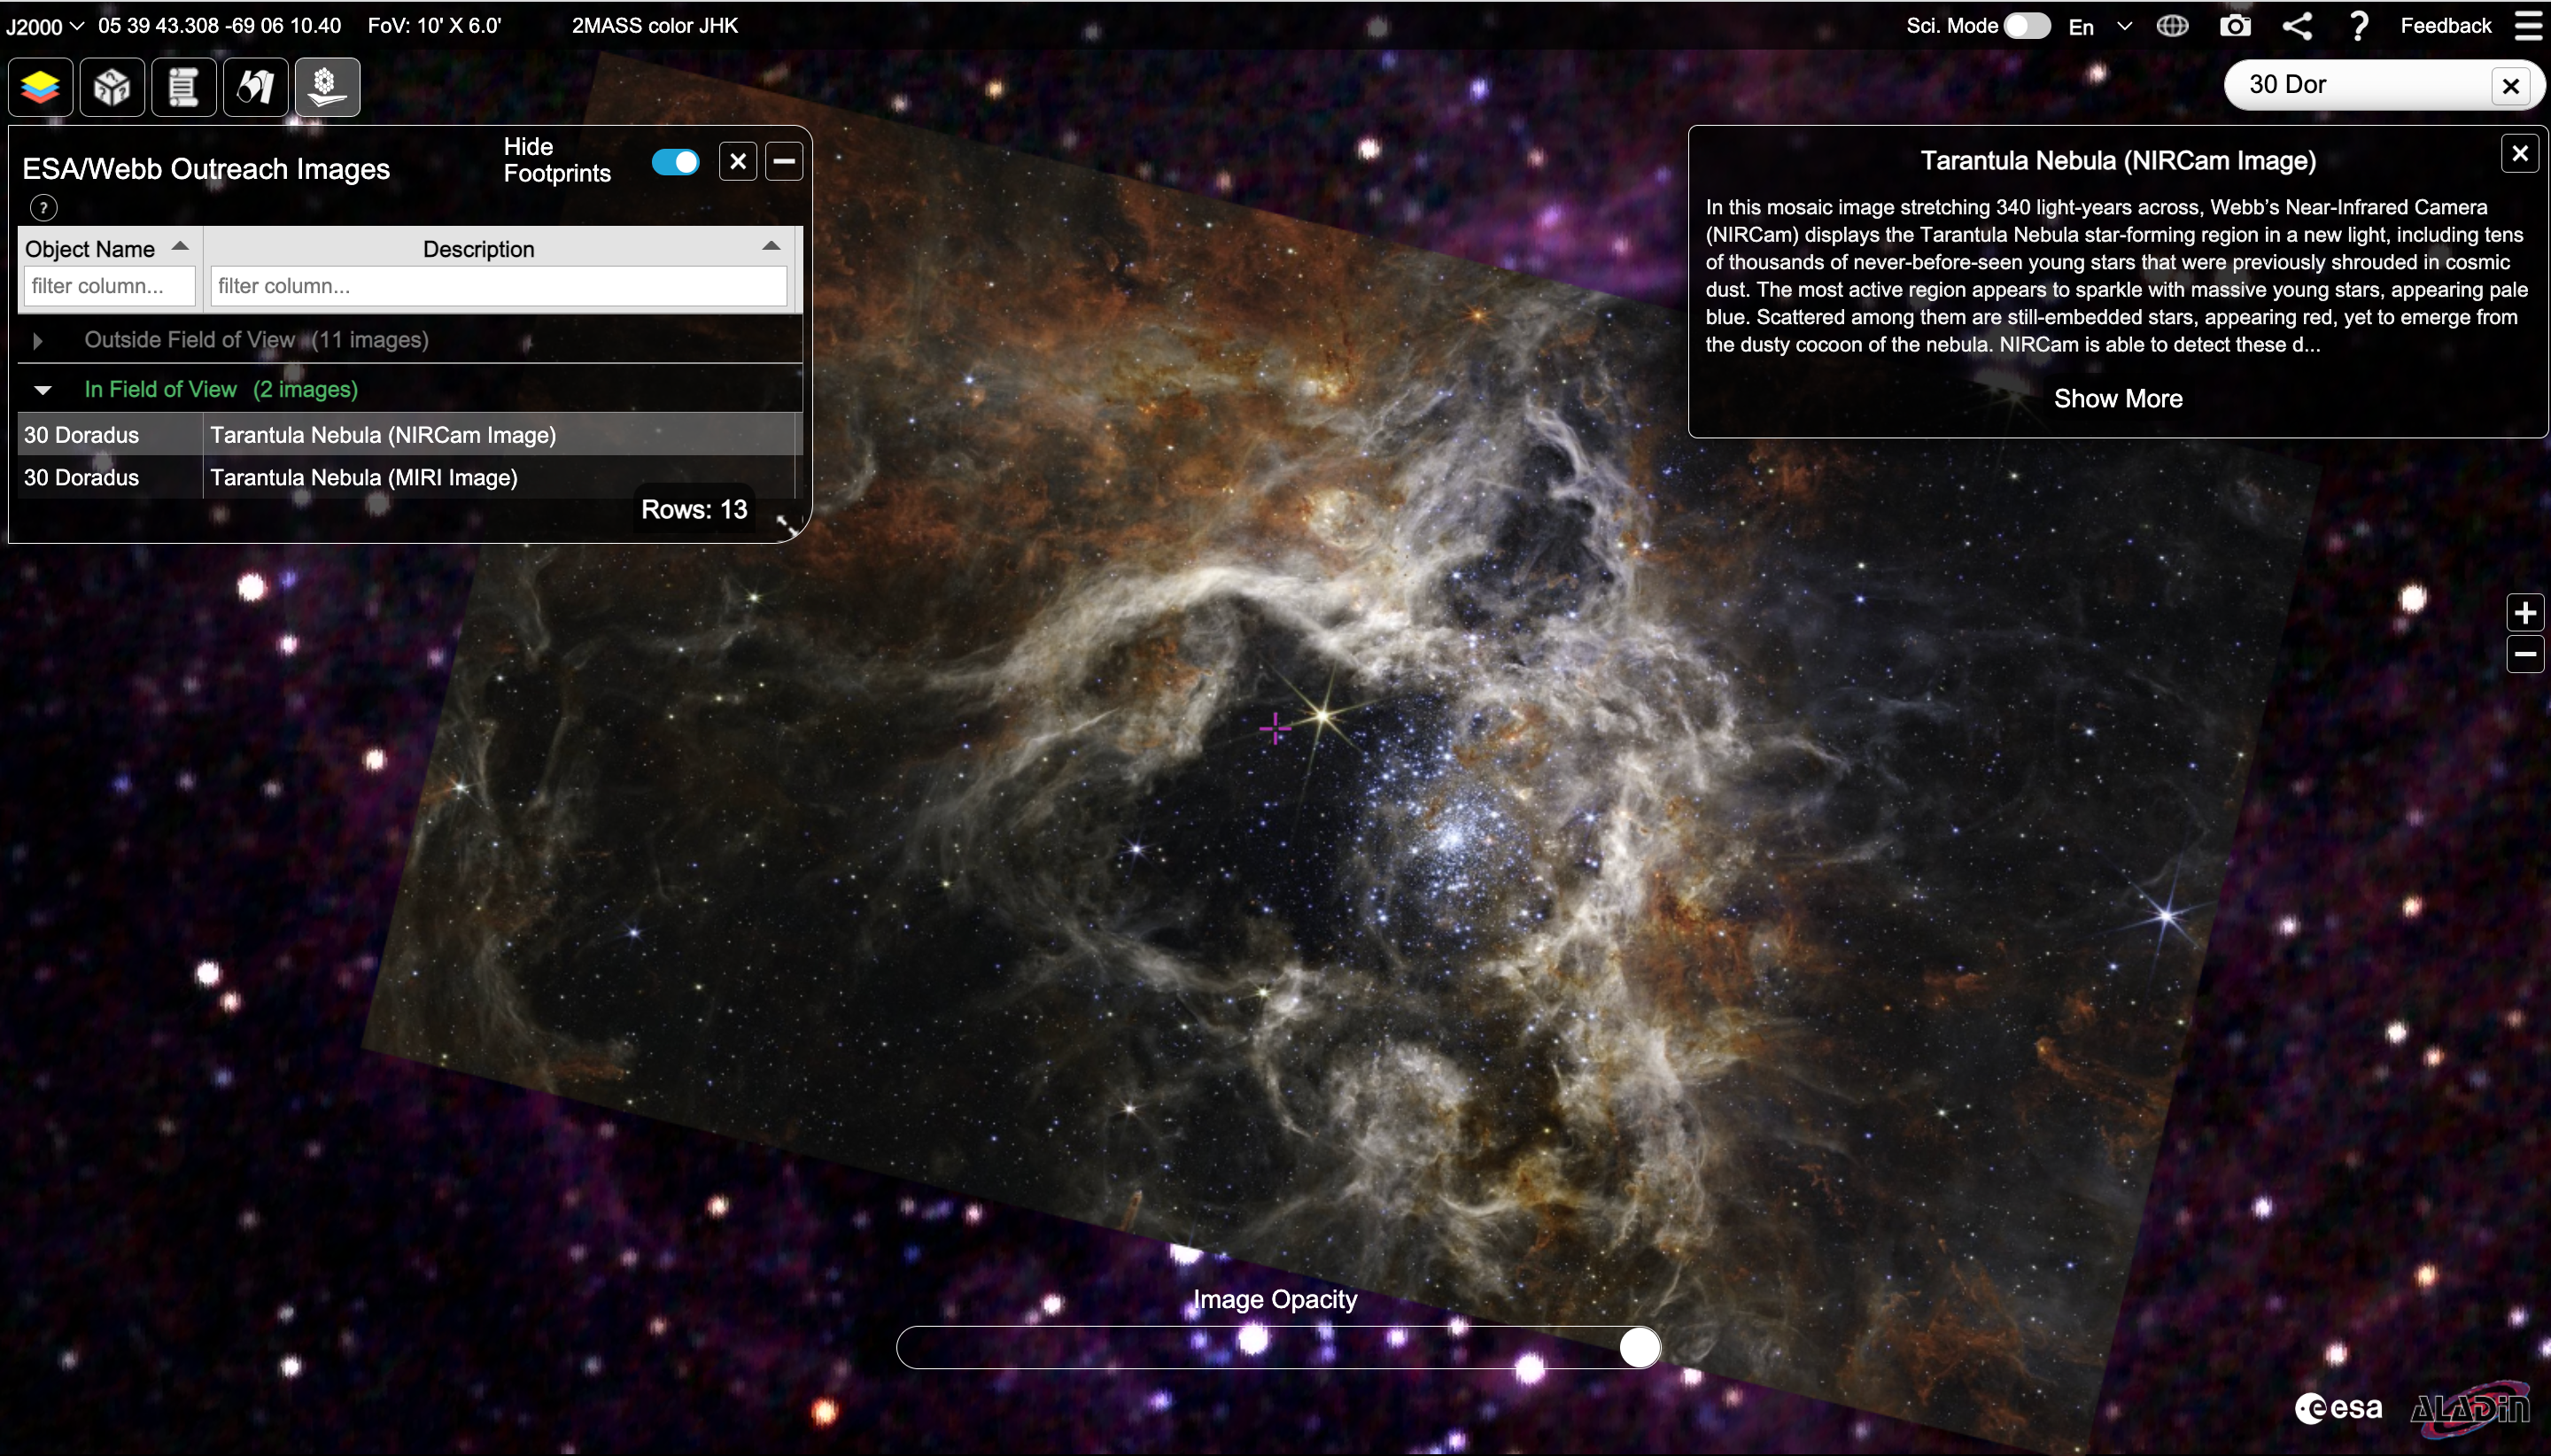

ESA/Webb Image On the ESASky Platform

This is a screenshot of the ESASky portal, featuring the ESA/Webb image of the Tarantula Nebula.

Credit: ESASky and ESA/Webb